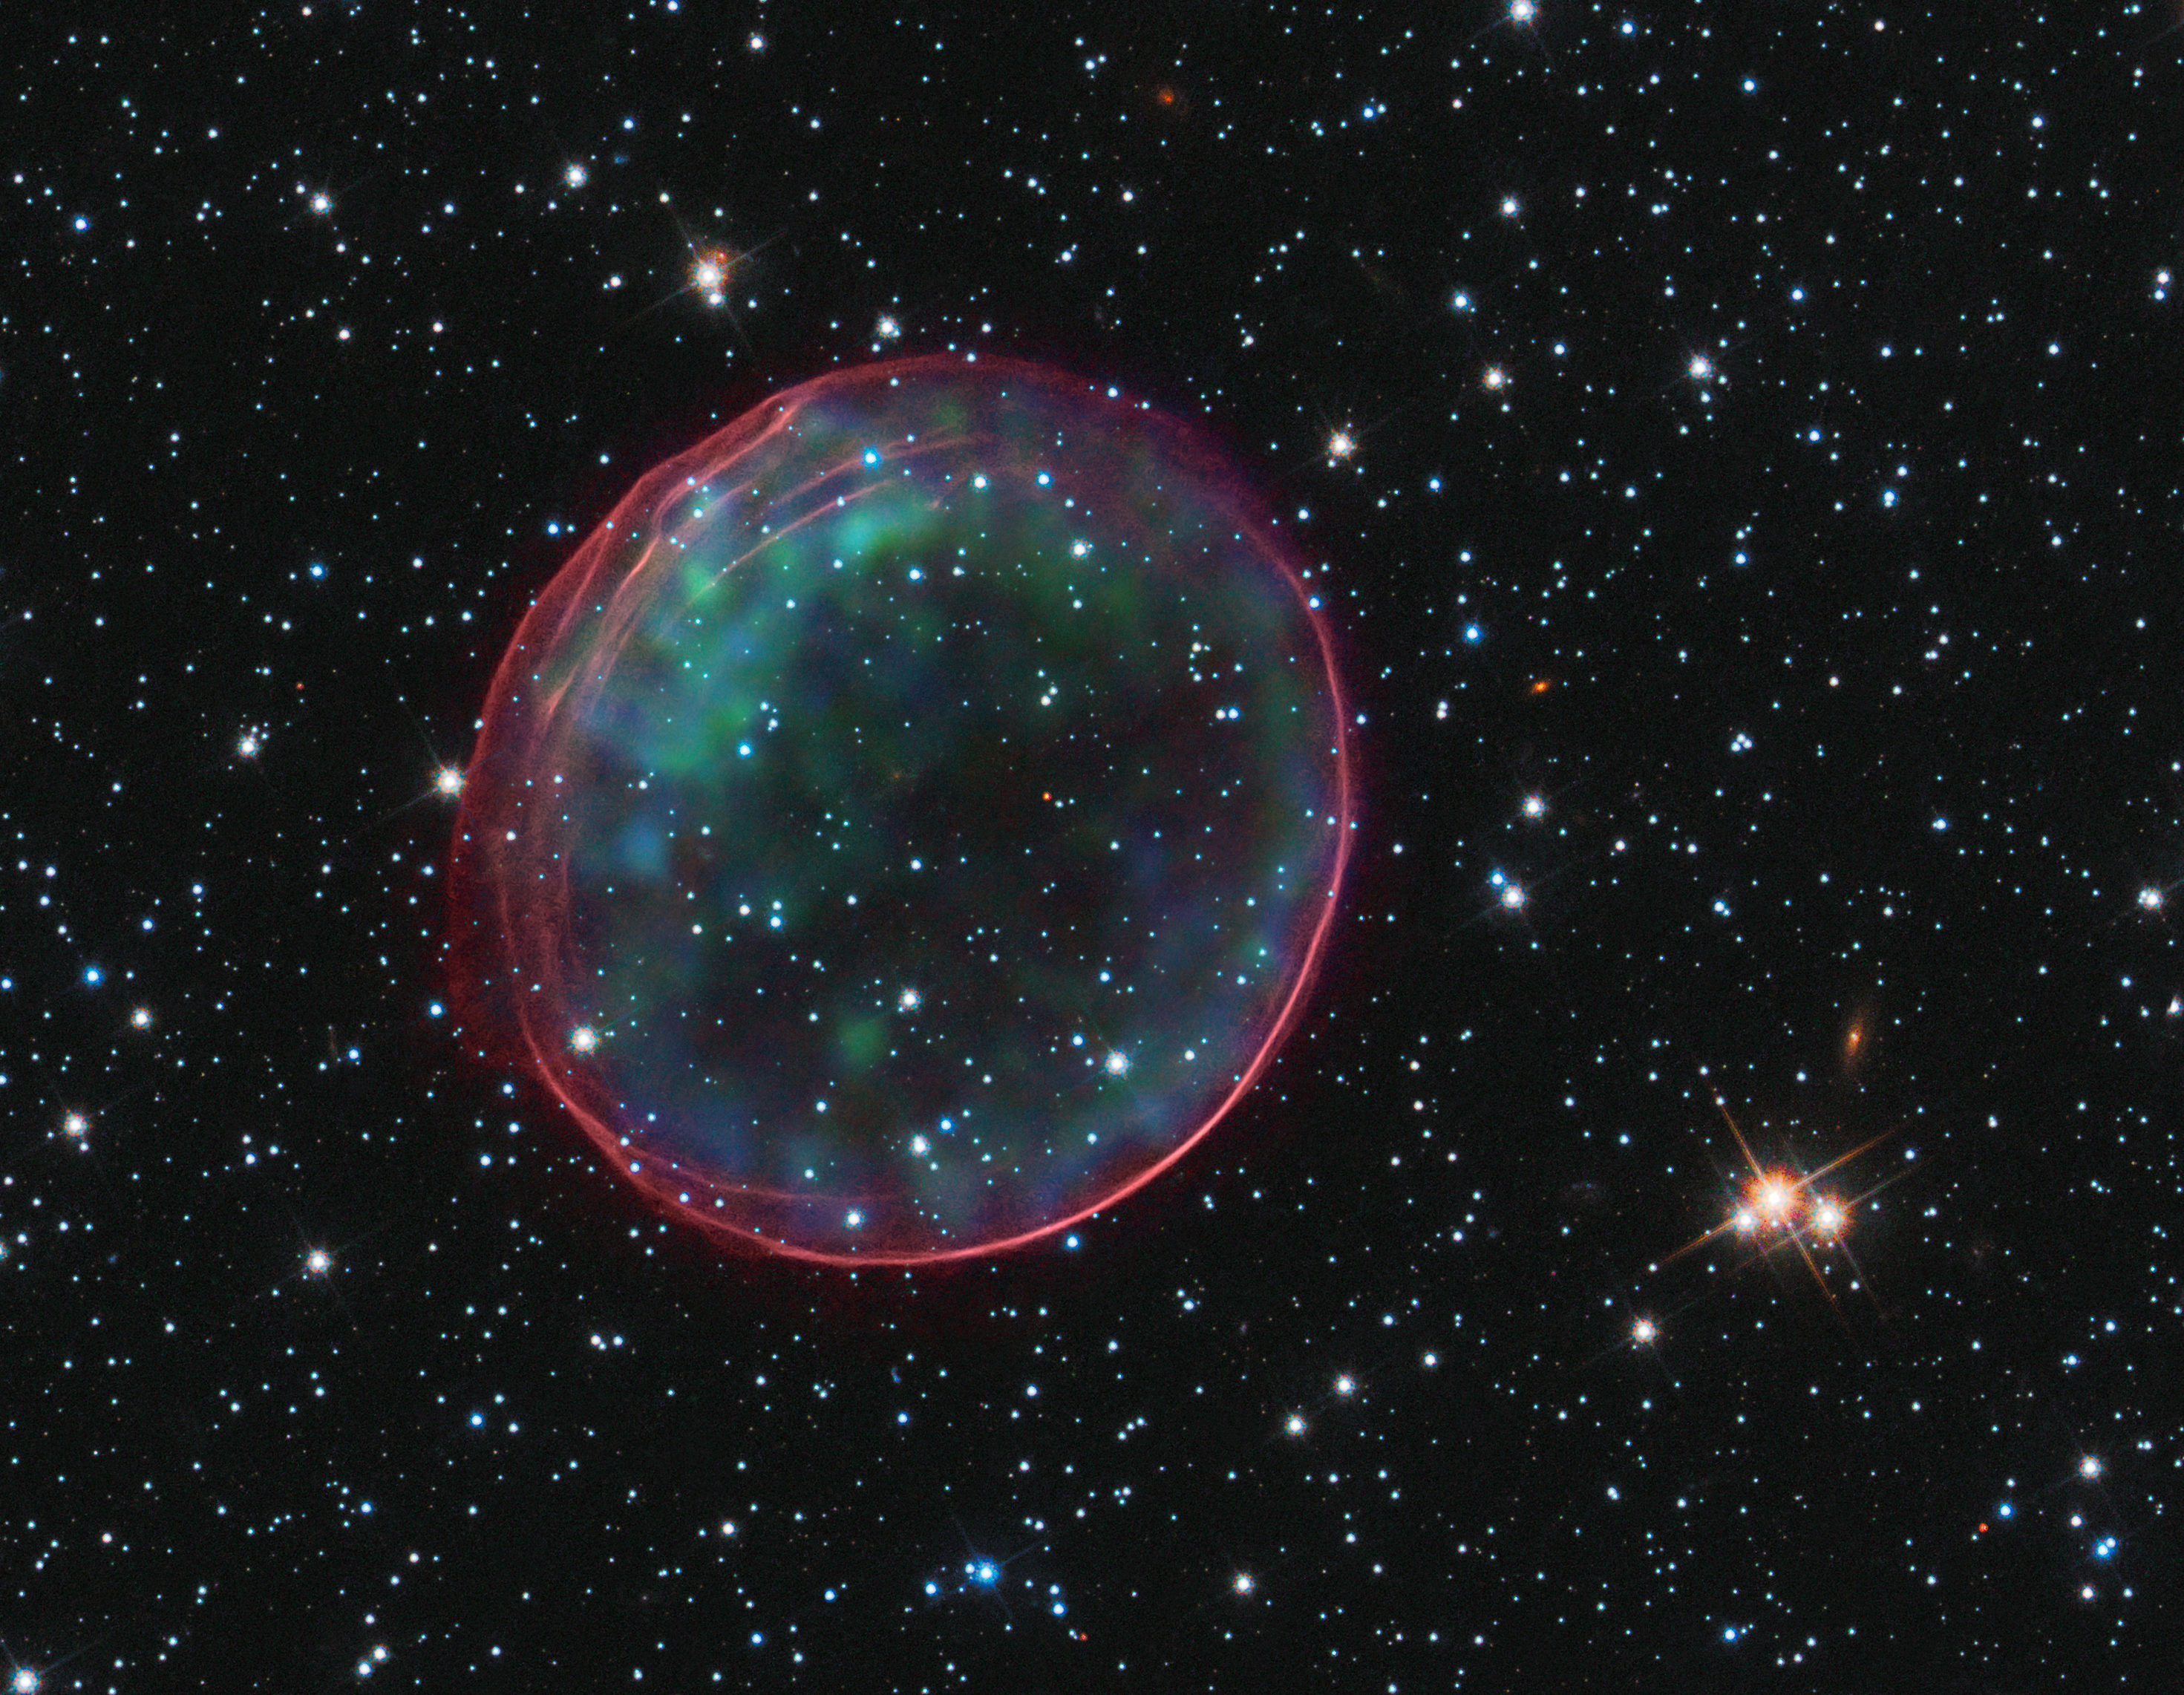

Hubble and Chandra spot a celestial bauble

This delicate shell, photographed by the NASA/ESA Hubble Space Telescope, appears to float serenely in the depths of space, but this apparent calm hides an inner turmoil. The gaseous envelope formed as the expanding blast wave and ejected material from a supernova tore through the nearby interstellar medium. Called SNR B0509-67.5 (or SNR 0509 for short), the bubble is the visible remnant of a powerful stellar explosion in the Large Magellanic Cloud (LMC), a small galaxy about 160 000 light-years from Earth. Ripples in the shell’s surface may be caused either by subtle variations in the density of the ambient interstellar gas, or possibly be driven from the interior by fragments from the initial explosion. The bubble-shaped shroud of gas is 23 light-years across and is expanding at more than 18 million km/h.

Hubble’s Advanced Camera for Surveys observed the supernova remnant on 28 October 2006 with a filter that isolates light from the glowing hydrogen seen in the expanding shell. These observations were then combined with visible-light images of the surrounding star field that were imaged with Hubble’s Wide Field Camera 3 on 4 November 2010, and archival X-ray observations taken by NASA’s Chandra X-ray Observatory.

Credit: NASA, ESA, the Hubble Heritage Team (STScI/AURA), and NASA/CXC/SAO/J. Hughes